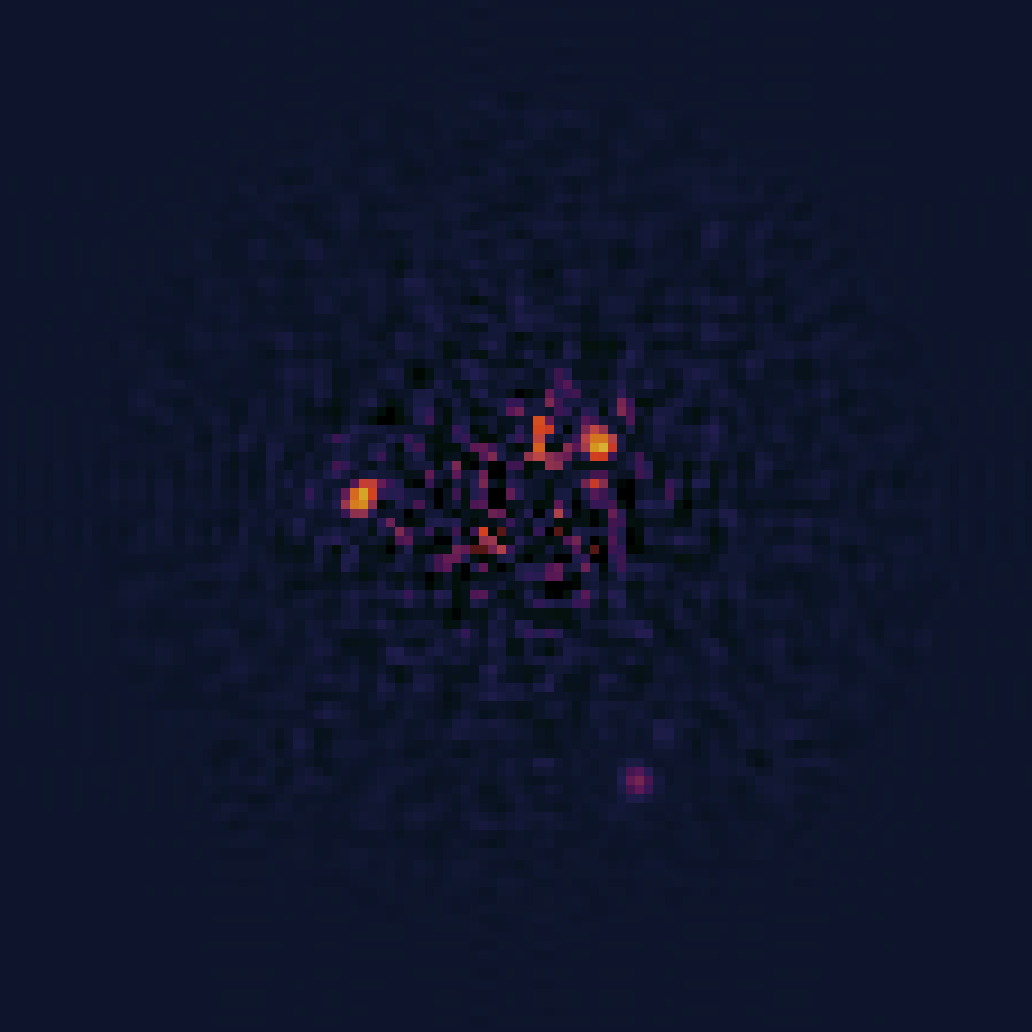

Software-processed NICMOS image of HR 8799 planetary system

Recent, sophisticated software processing of the NICMOS data removes most of the scattered starlight to reveal three planets orbiting HR 8799. Astronomers used this decade-old image to calculate the orbits of the planets.

Credit: NASA, ESA, and R. Soummer (STScI)